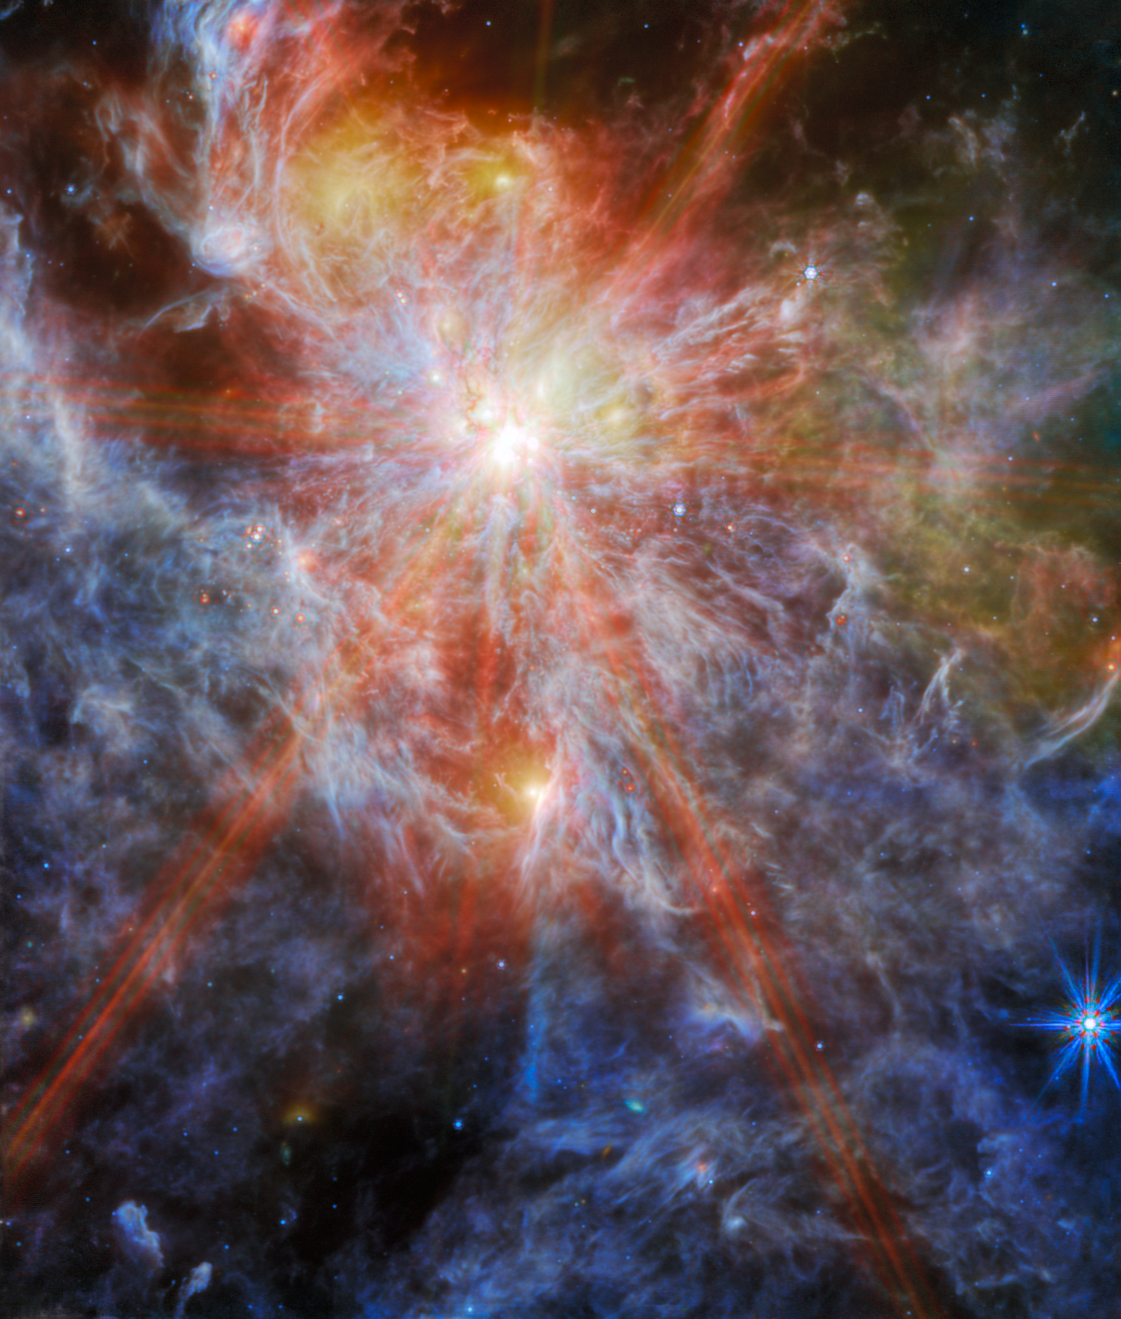

A massive cluster is born

This image from the NASA/ESA/CSA James Webb Space Telescope features an H II region in the Large Magellanic Cloud (LMC), a satellite galaxy of our Milky Way. This nebula, known as N79, is a region of interstellar atomic hydrogen that is ionised, captured here by Webb’s Mid-InfraRed Instrument (MIRI).

N79 is a massive star-forming complex spanning roughly 1630 light-years in the generally unexplored southwest region of the LMC. N79 is typically regarded as a younger version of 30 Doradus (also known as the Tarantula Nebula), another of Webb’s recent targets. Research suggests that N79 has a star formation efficiency exceeding that of 30 Doradus by a factor of two over the past 500 000 years.

This particular image centres on one of the three giant molecular cloud complexes, dubbed N79 South (S1 for short). The distinct ‘starburst’ pattern surrounding this bright object is a series of diffraction spikes. All telescopes which use a mirror to collect light, as Webb does, have this form of artifact which arises from the design of the telescope. In Webb's case, the six largest starburst spikes appear because of the hexagonal symmetry of Webb's 18 primary mirror segments. Patterns like these are only noticeable around very bright, compact objects, where all the light comes from the same place. Most galaxies, even though they appear very small to our eyes, are darker and more spread out than a single star, and therefore do not show this pattern.

At the longer wavelengths of light captured by MIRI, Webb’s view of N79 showcases the region’s glowing gas and dust. This is because mid-infrared light is able to reveal what is happening deeper inside the clouds (while shorter wavelengths of light would be absorbed or scattered by dust grains in the nebula). Some still-embedded protostars also appear in this field.

Star-forming regions such as this are of interest to astronomers because their chemical composition is similar to that of the gigantic star-forming regions observed when the Universe was only a few billion years old and star formation was at its peak. Star-forming regions in our Milky Way galaxy are not producing stars at the same furious rate as N79, and have a different chemical composition. Webb is now providing astronomers the opportunity to compare and contrast observations of star formation in N79 with the telescope’s deep observations of distant galaxies in the early Universe.

These observations of N79 are part of a Webb programme that is studying the evolution of the circumstellar discs and envelopes of forming stars over a wide range in mass and at different evolutionary stages. Webb’s sensitivity will enable scientists to detect for the first time the planet-forming dust discs around stars of similar mass to that of our Sun at the distance of the LMC.

This image includes 7.7-micron light shown in blue, 10 microns in cyan, 15 microns in yellow, and 21 microns in red (770W, 1000W, 1500W, and 2100W filters, respectively).

Credit: ESA/Webb, NASA & CSA, O. Nayak, M. Meixner